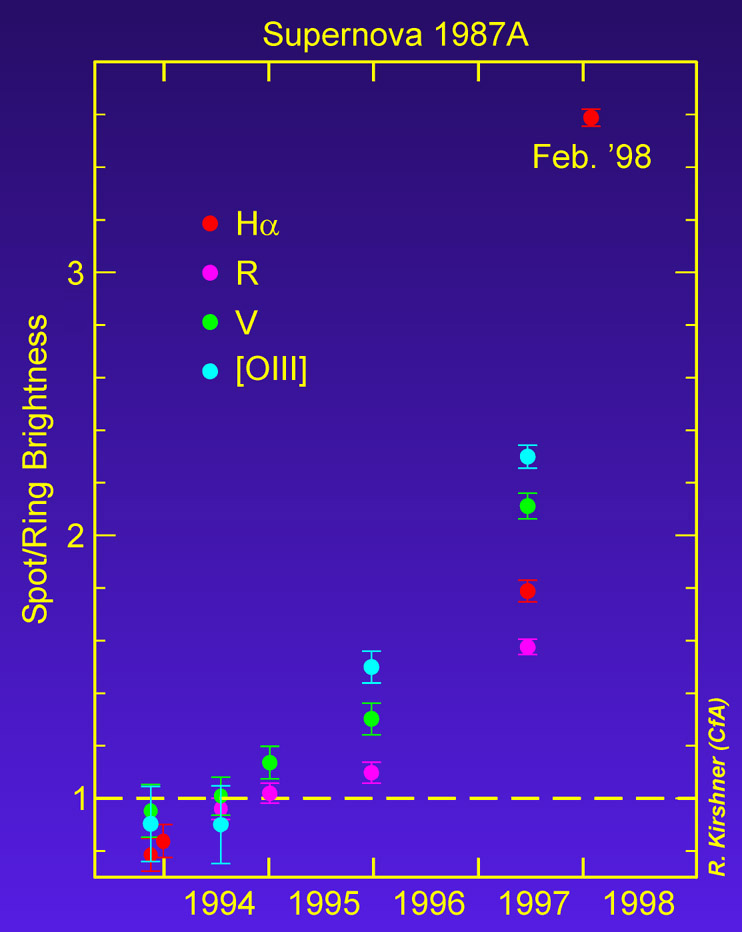

Hubble data shows increase in brightness of knot

NASA's Hubble Space Telescope is giving astronomers a ringside seat to a never before seen titanic collision of an onrushing stellar shock wave with an eerie glowing gas ring encircling a nearby stellar explosion, called supernova 1987A.

Though the star's self-destruction was first seen nearly 11 years ago on Feb. 23, 1987, astronomers are just now beginning to witness its tidal wave of energy reaching the "shoreline" of the immense light-year wide ring.

Shocked by the 40-million mile per hour sledgehammer blow, a 100-billion mile diameter knot of gas in a piece of the ring has already begun to "light up", as its temperature surges from a few thousand degrees to a million degrees Fahrenheit.

Credit: R. Kirshner (Harvard-Smithsonian Center for Astrophysics)